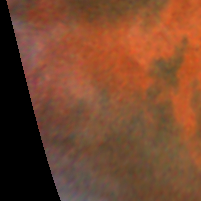

Decay of a Martian dust storm

The dust appears to be confined to the canyons, which can be as much as 8 km deep and hundreds of km wide.

Credit: Steve Lee (Univ. Colorado), Phil James (Univ. Toledo), and Mike Wolff (Univ. Toledo), and NASA/ESA